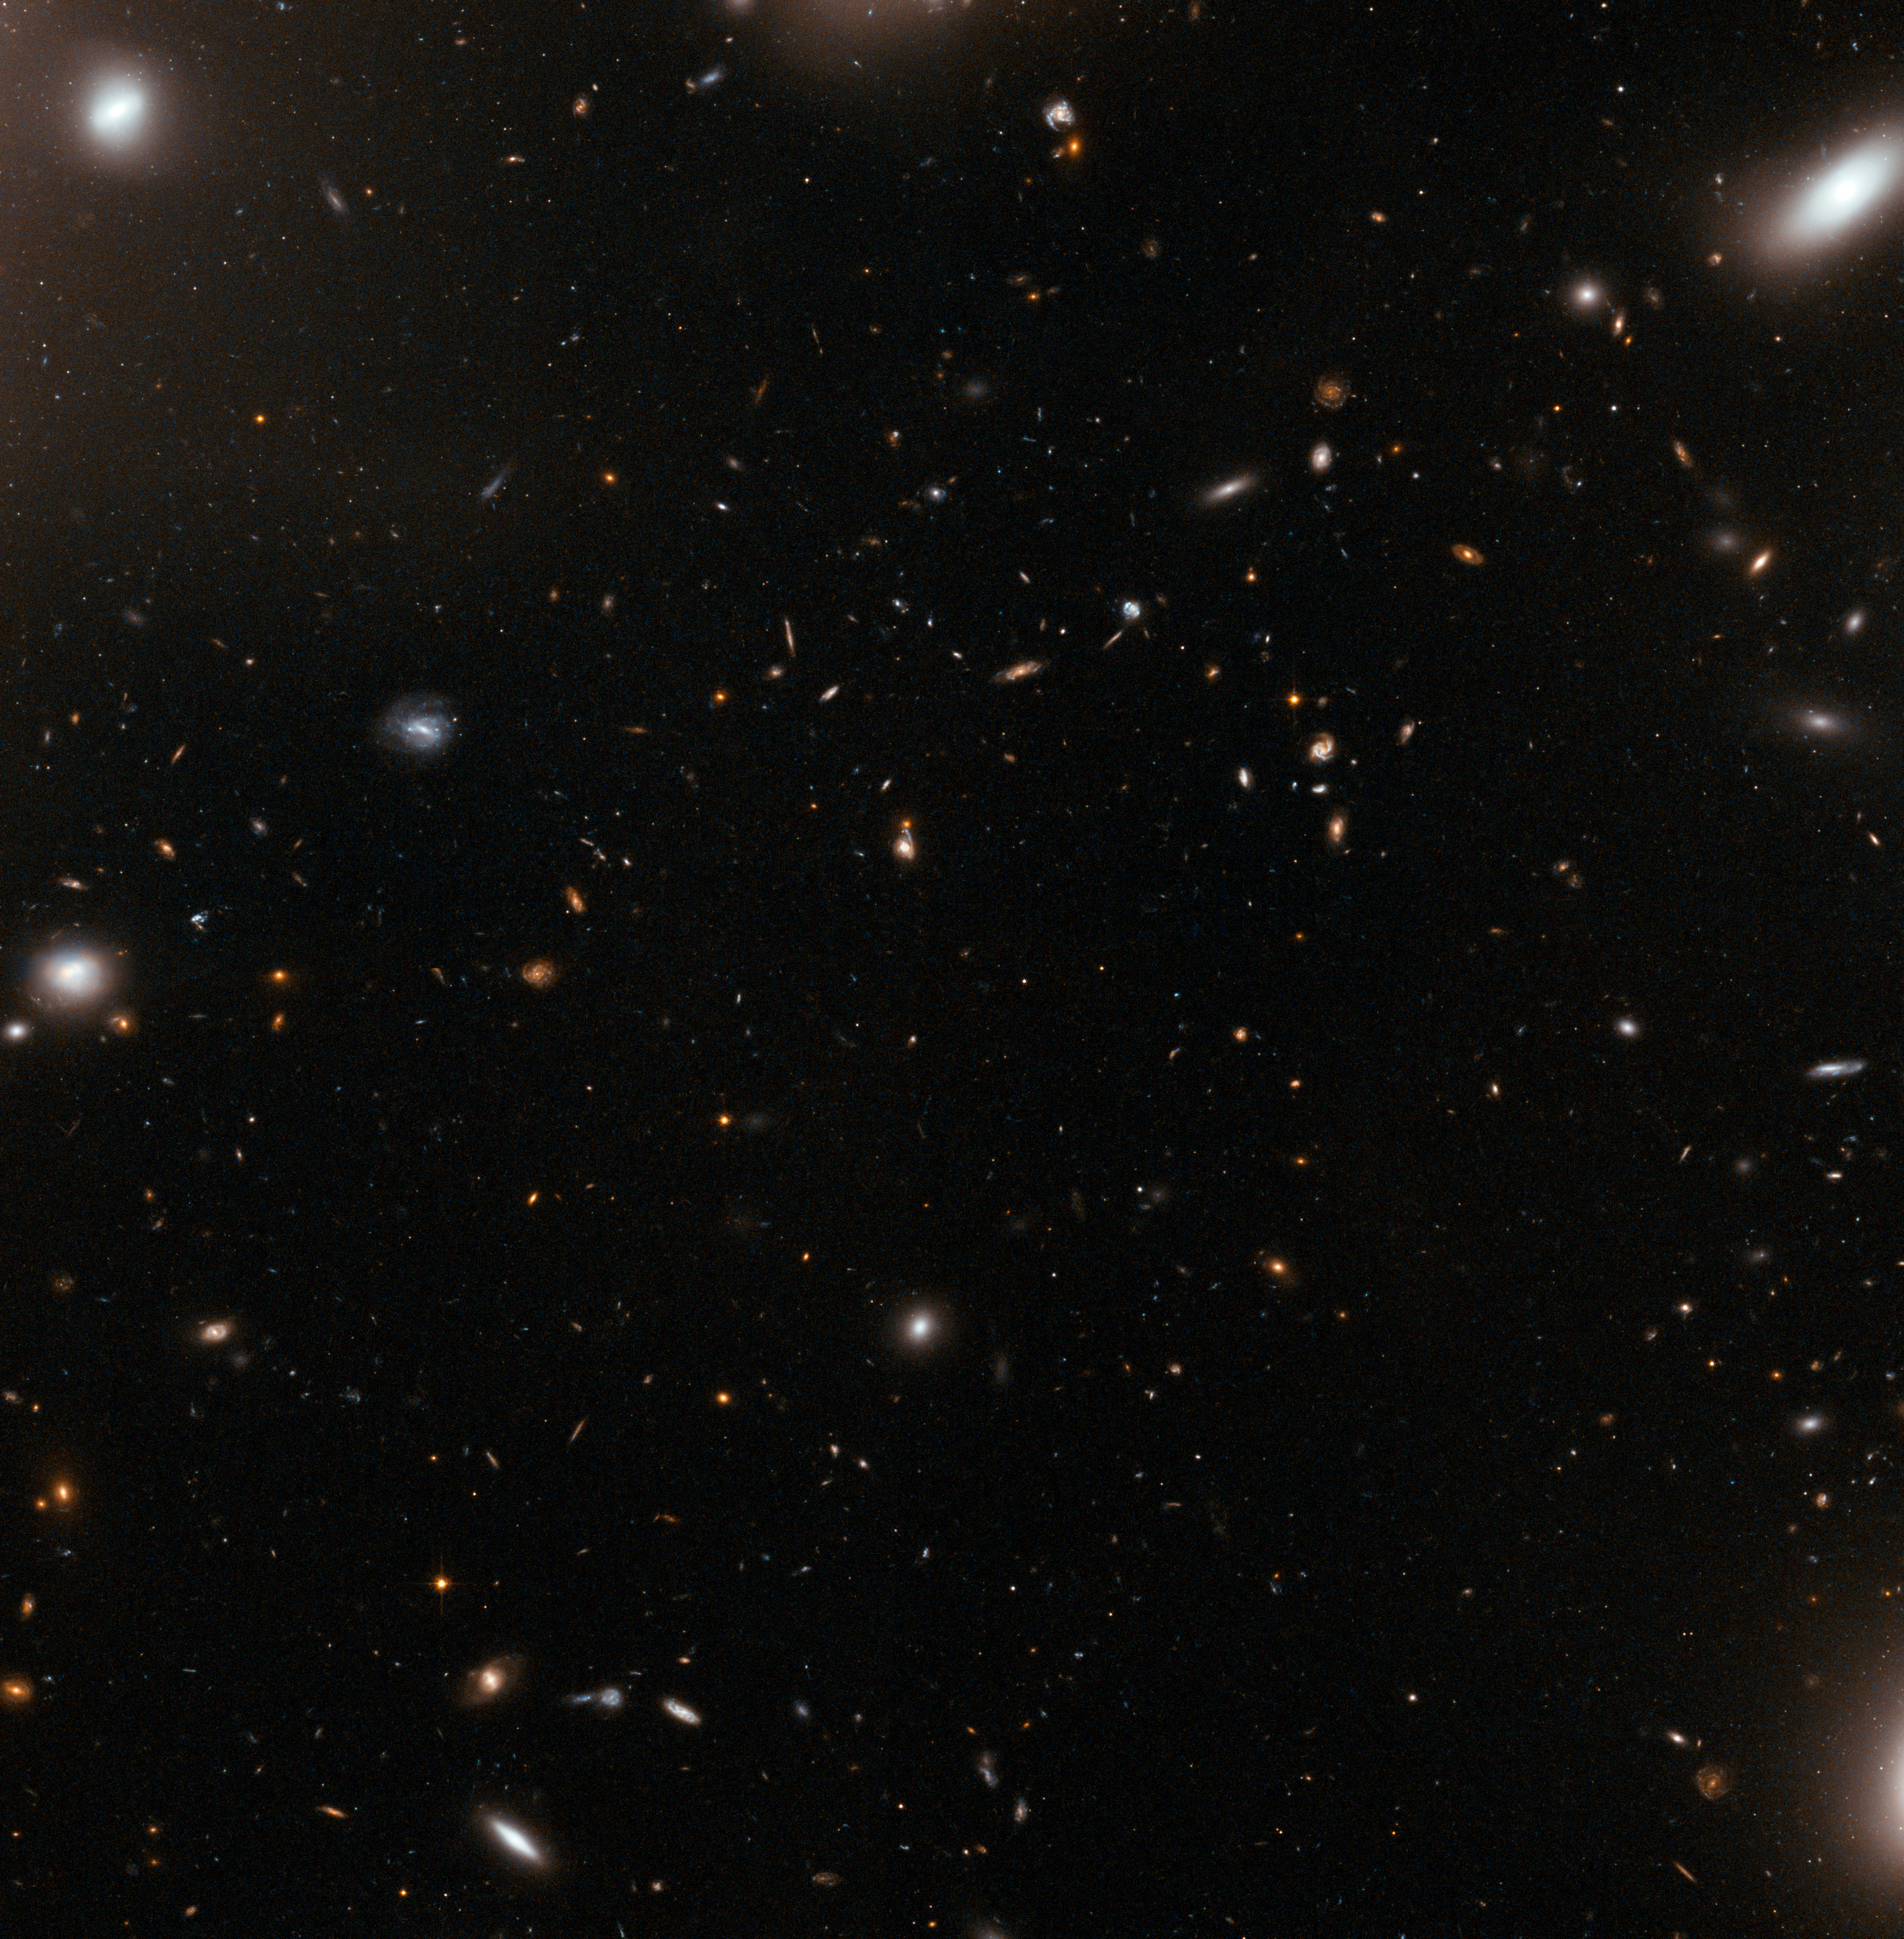

The eye of the storm

This image from the NASA/ESA Hubble Space Telescope could seem like a quiet patch of sky at first glance. But zooming into the central part of a galaxy cluster — one of the largest structures of the Universe — is rather like looking at the eye of the storm.

Clusters of galaxies are large groups consisting of dozens to hundreds of galaxies, which are bound together by gravity. The galaxies sometimes stray too close to one another and the huge gravitational forces at play can distort them or even rip matter off when they collide with one another.

This particular cluster, called Abell 1185, is a chaotic one. Galaxies of various shapes and sizes are drifting dangerously close to one another. Some have already been ripped apart in this cosmic maelstrom, shedding trails of matter into the void following their close encounter. They have formed a familiar shape called The Guitar, located just outside the frame of this image.

Abell 1185 is located approximately 400 million light-years away from Earth and spans one million light-years across. A few of the elliptical galaxies that form the cluster are visible in the corners of this image, but mostly, the small elliptical shapes seen are faraway galaxies in the background, located much further away, in a quieter area of the Universe.

Credit: ESA/Hubble & NASA